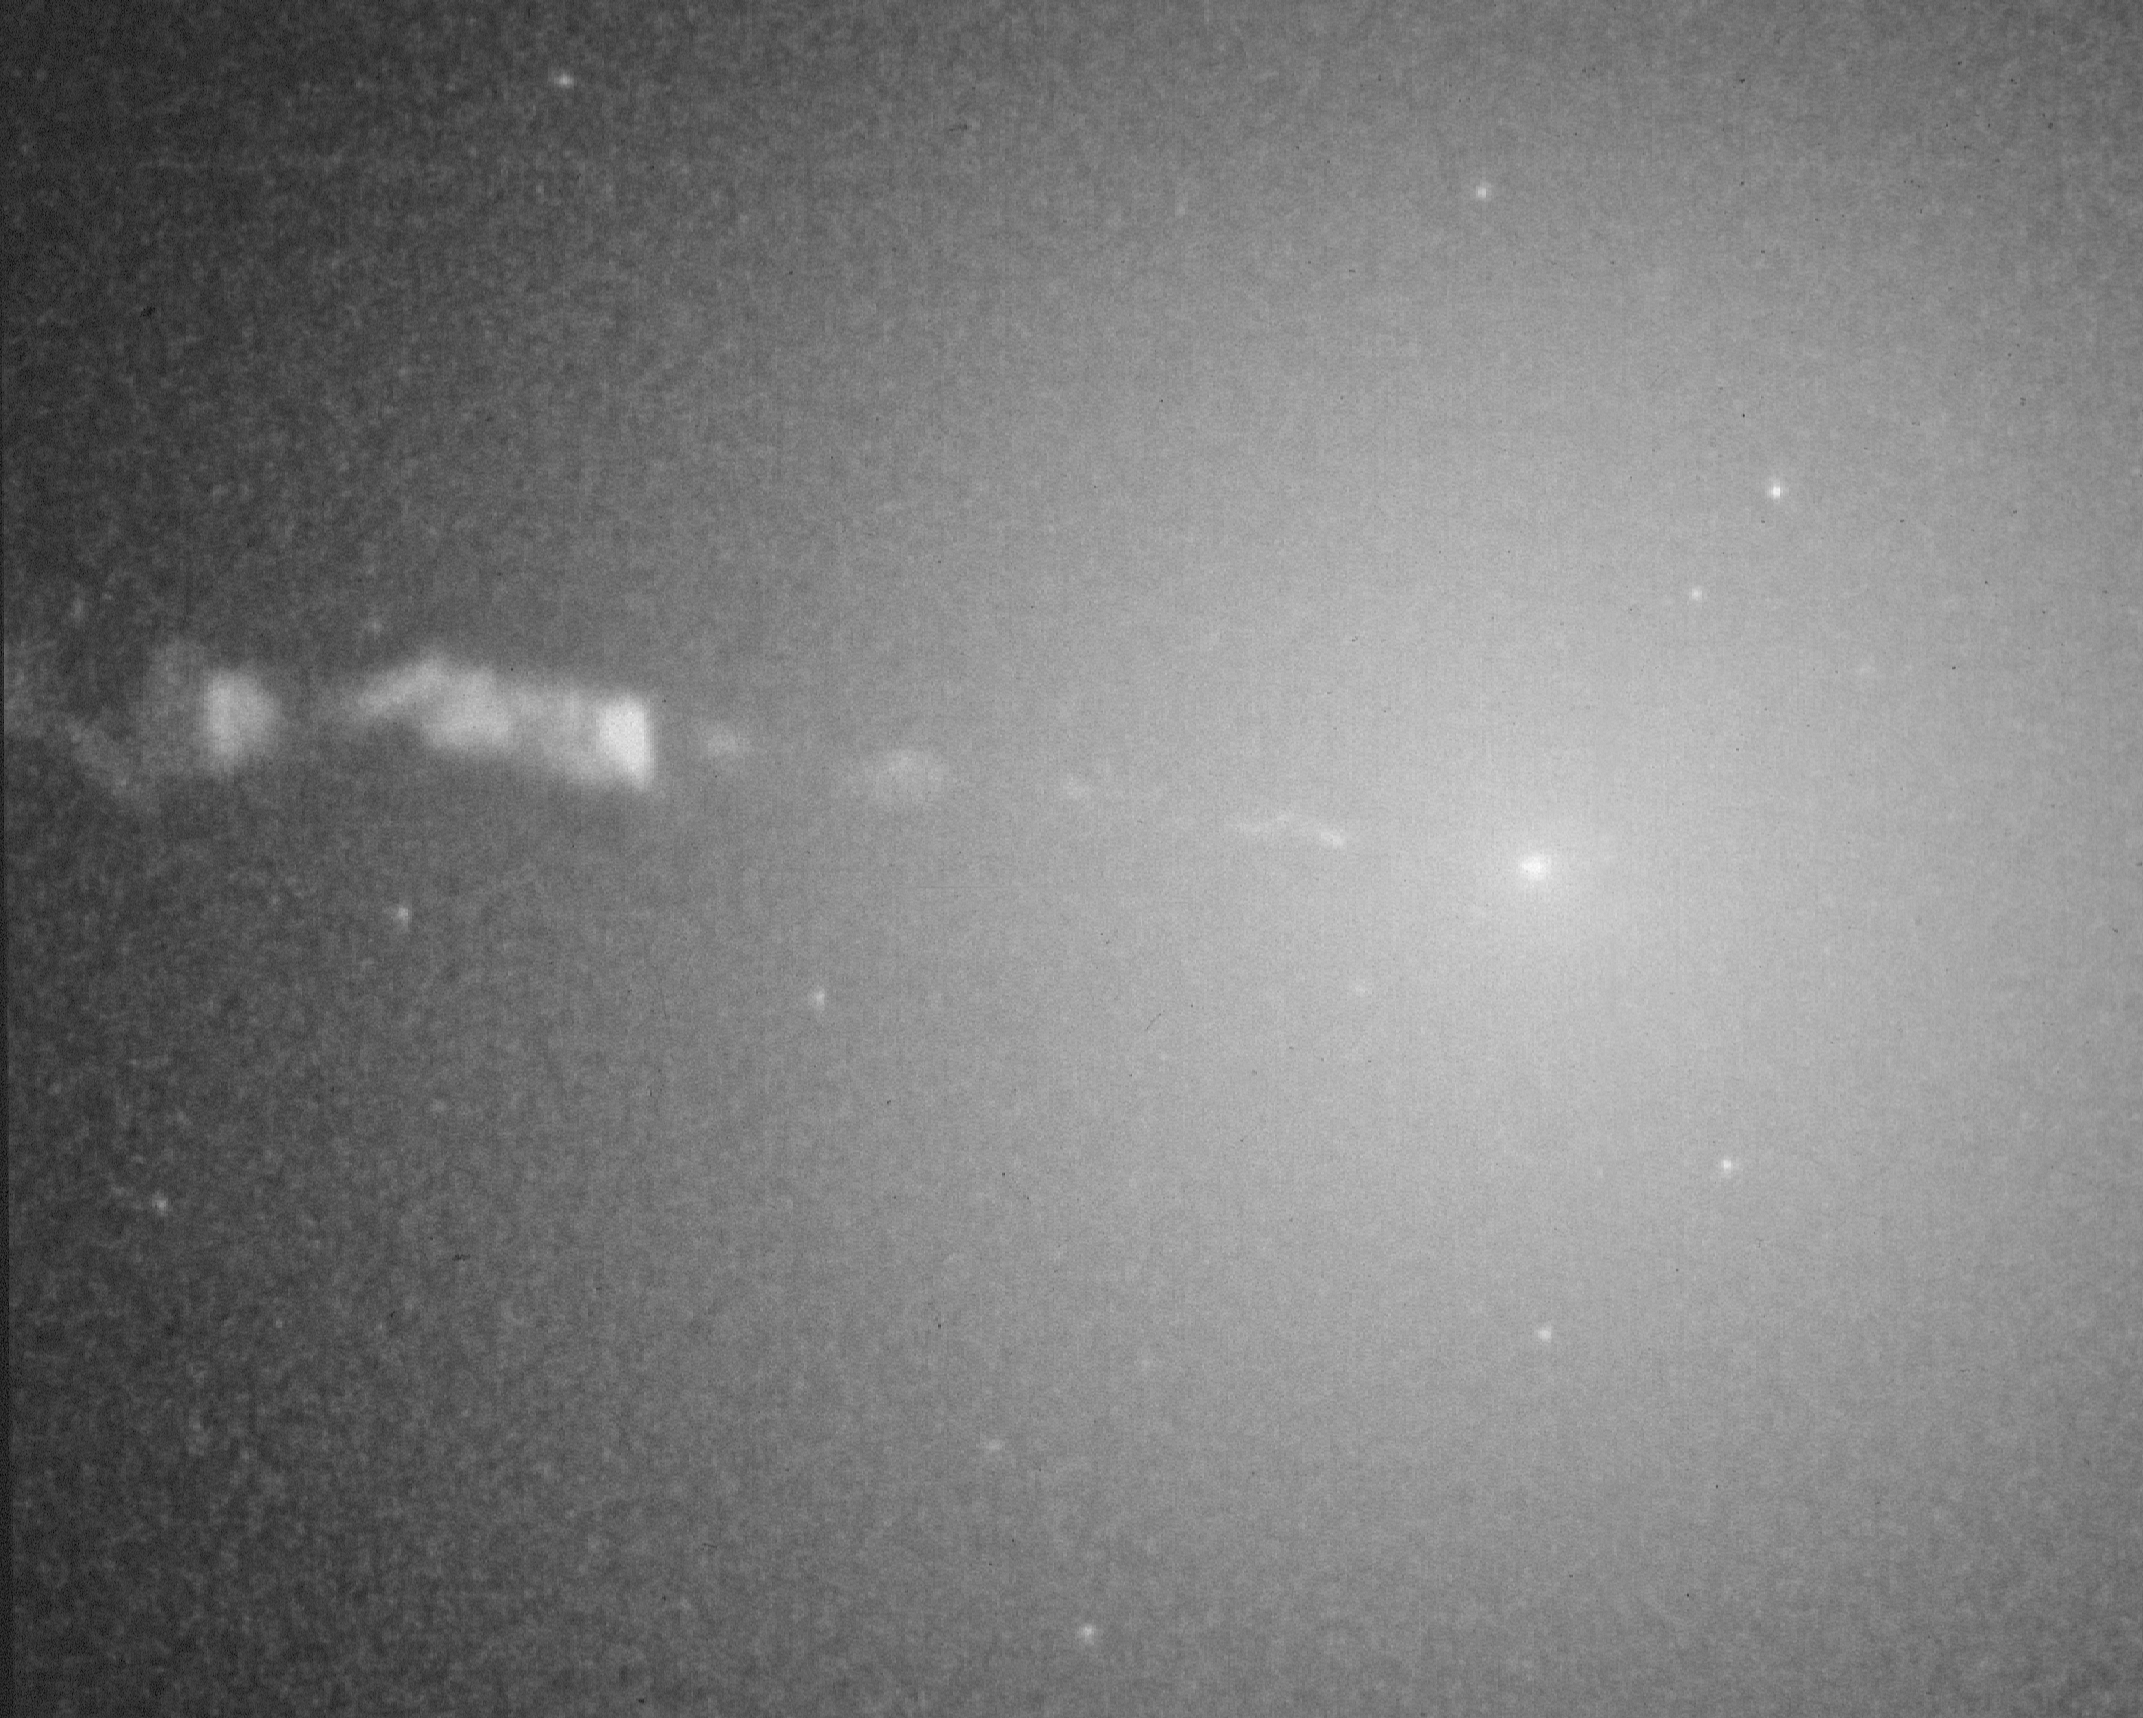

Compact core of galaxy M87

Astronomers report today that they have found intriguing evidence that a black hole weighing over 2.6 billion times the mass of the Sun exists at the center of the giant elliptical galaxy M87, based upon images taken by NASA's Hubble Space Telescope (HST). The images show that stars become strongly concentrated towards the center of M87, as if drawn into the center and held there by the gravitational field of a massive black hole.

Credit: NASA & ESA